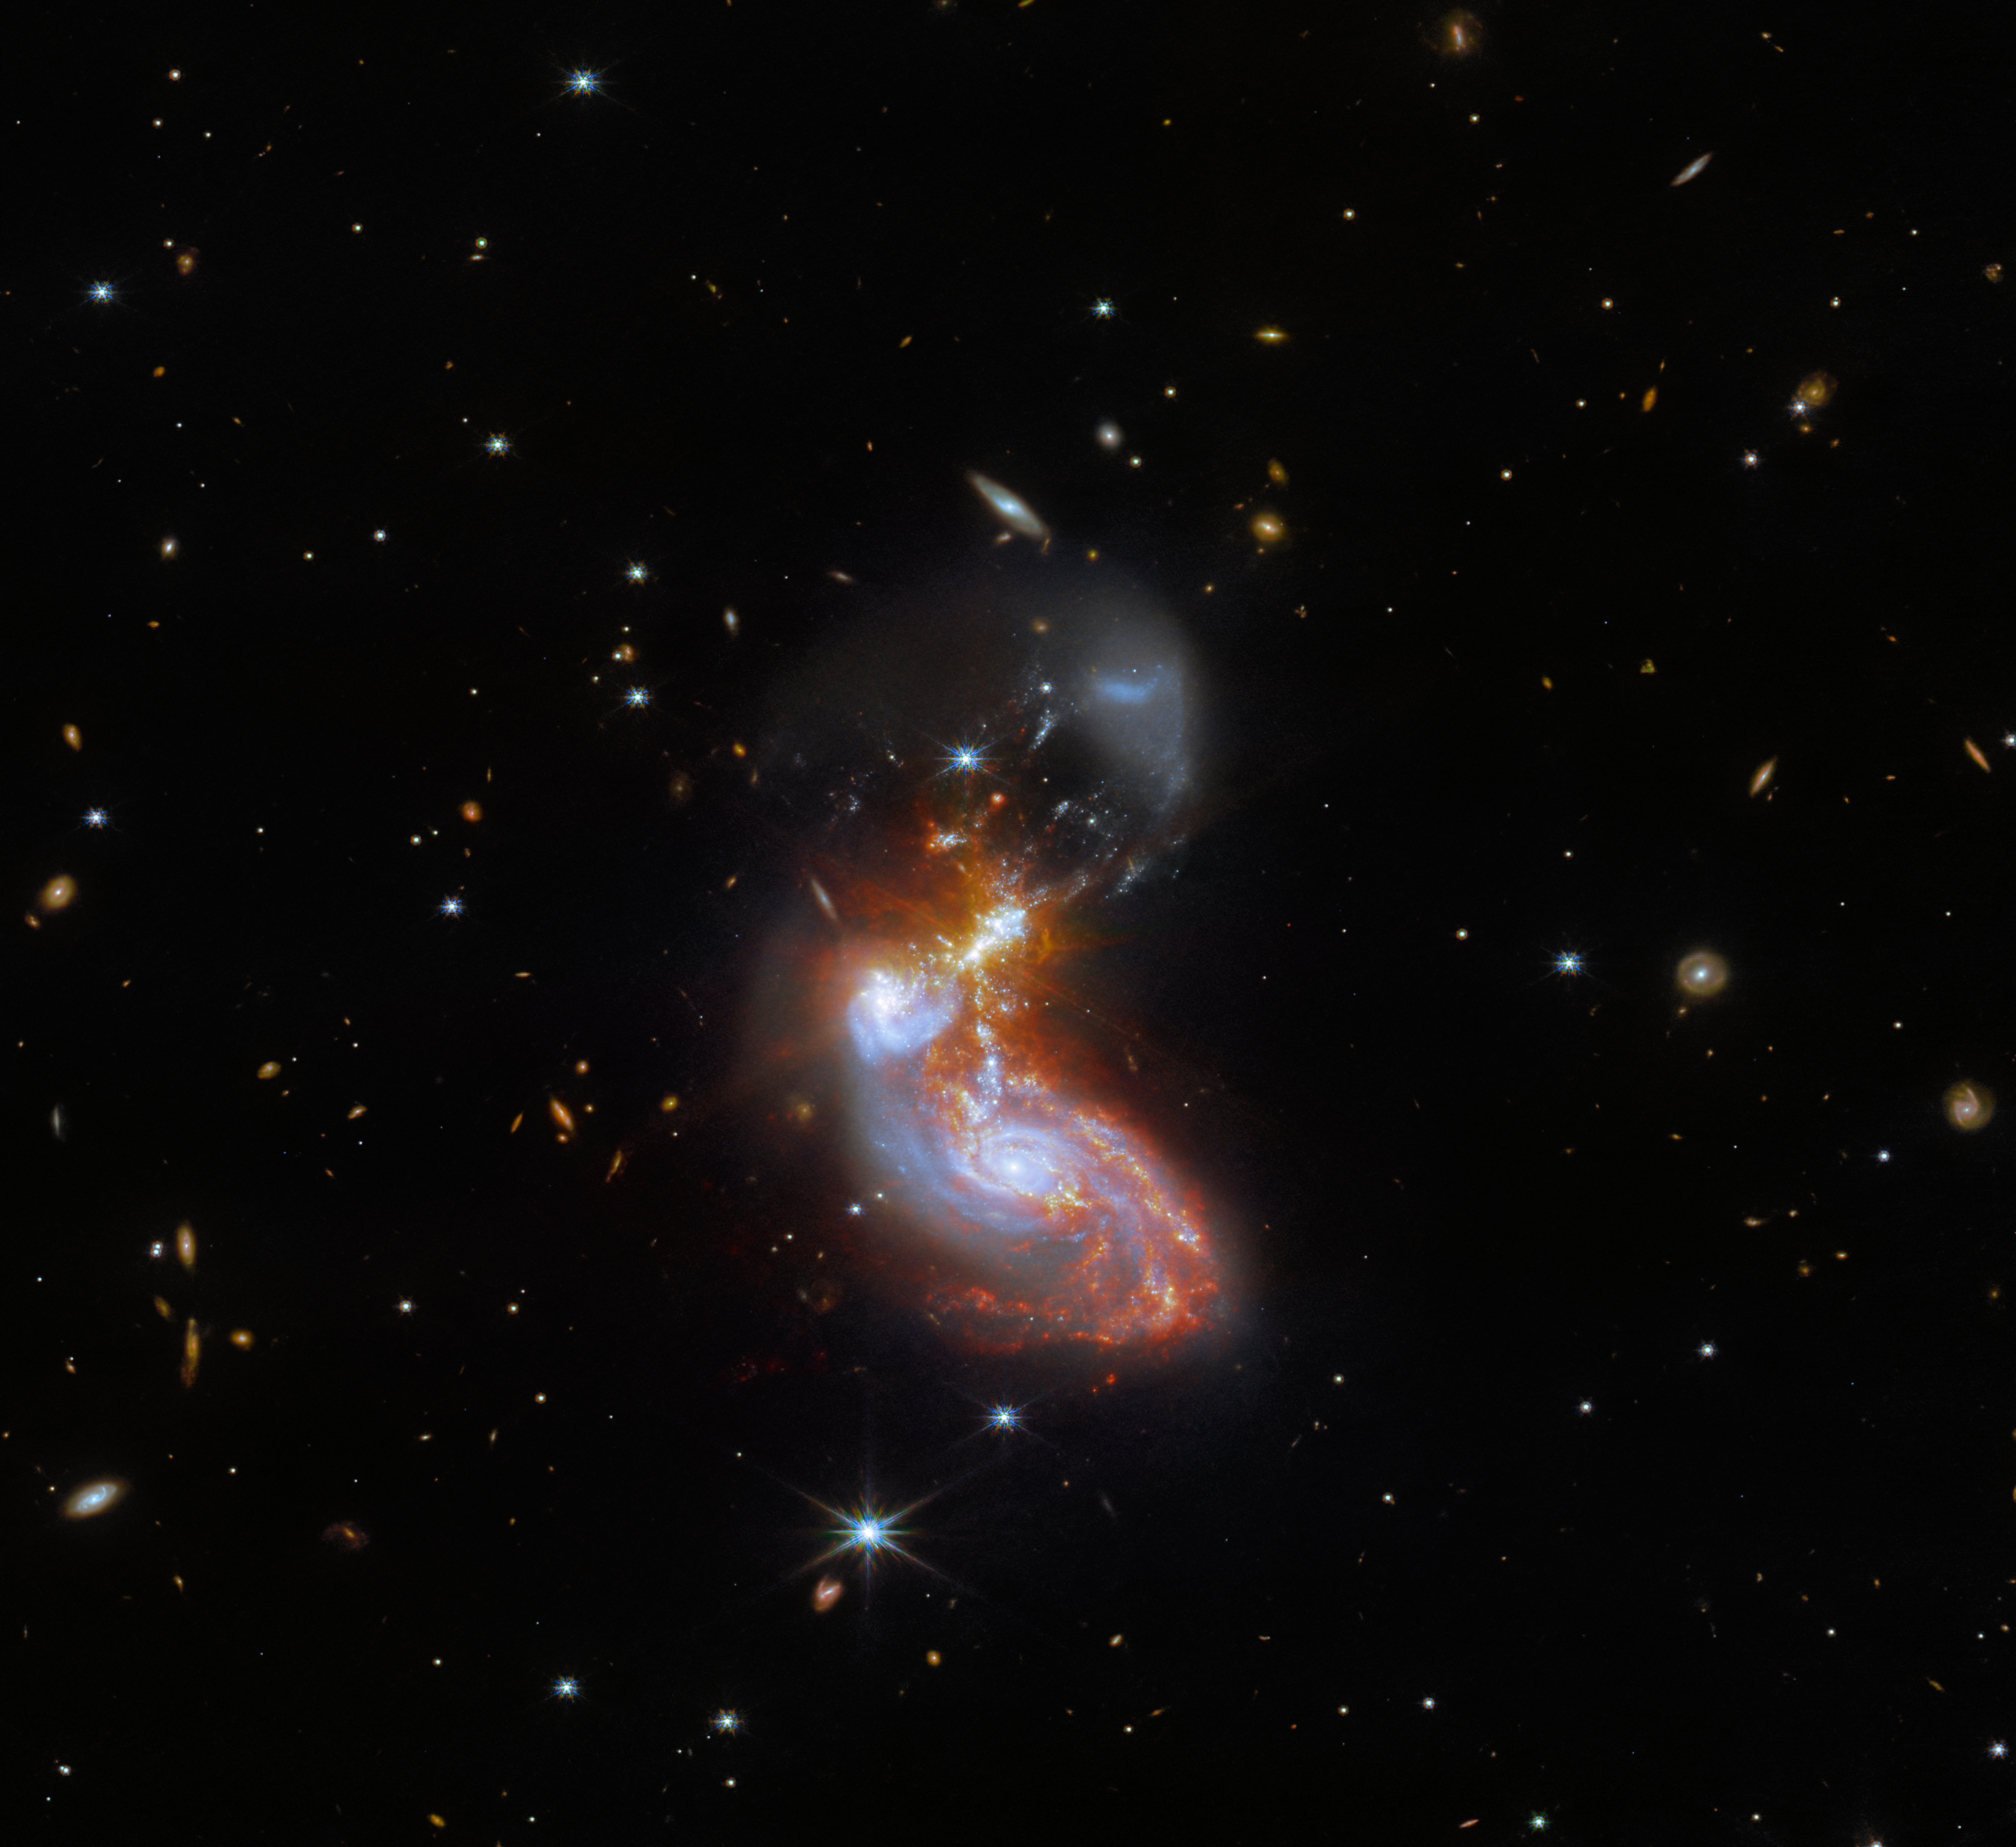

Galactic Get-Together

A merging galaxy pair cavort in this image captured by the NASA/ESA/CSA James Webb Space Telescope. This pair of galaxies, known to astronomers as II ZW 96, is roughly 500 million light-years from Earth and lies in the constellation Delphinus, close to the celestial equator. As well as the wild swirl of the merging galaxies, a menagerie of background galaxies are dotted throughout the image.

Credit: ESA/Webb, NASA & CSA, L. Armus, A. Evans; the Hubble Heritage Team (STScI/AURA)-ESA/Hubble Collaboration